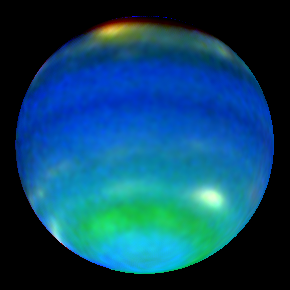

Neptune in Primary Colours

Clouds elevated above most of the methane absorption appear white, while the very highest clouds tend to be yellow-red as seen in the bright feature at the top of the image.

Credit: Lawrence Sromovsky (University of Wisconsin-Madison), NASA/ESA